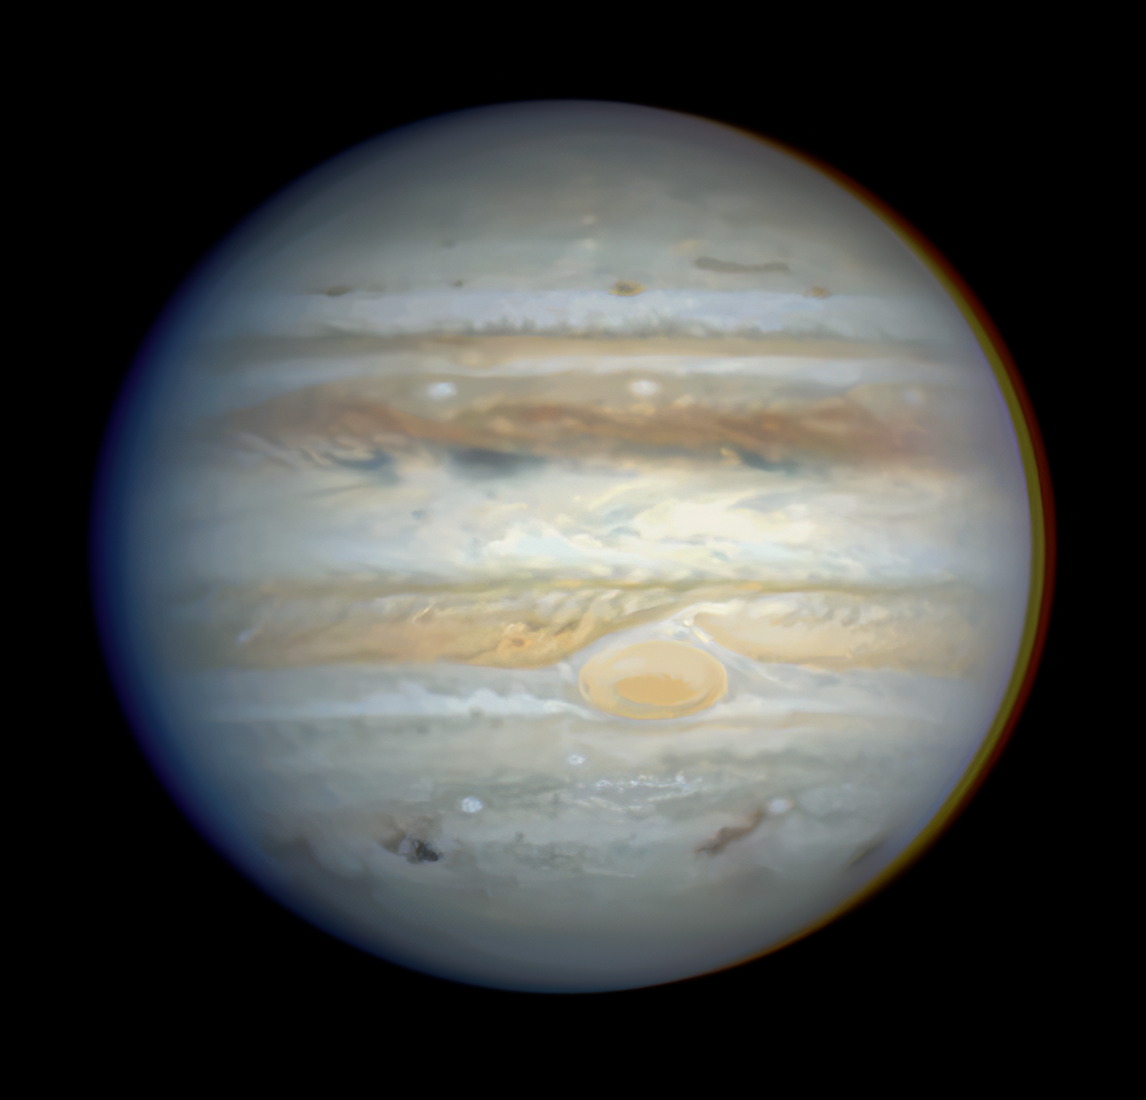

Impact A Site

A natural colour Hubble Space Telescope view of the full disk of the giant planet Jupiter shows numerous comet Shoemaker-Levy 9 impact sites as seen on July 22, 1994. The A impact site is on the lower left limb. From left to right the features are: the A site; the E-F complex near the white oval southwest of the Red Spot; the dispersing H site to the southeast of the Red Spot; and the site of Q, near the eastern edge. Comet fragment A impacted on July 16, E and F on July 17, H on July 18 and Q on July 20. The image was taken with the Wide Field & Planetary Camera-2 (WFPC2) in wide-field mode.

Credit: Hubble Space Telescope Comet Team, and NASA/ESA